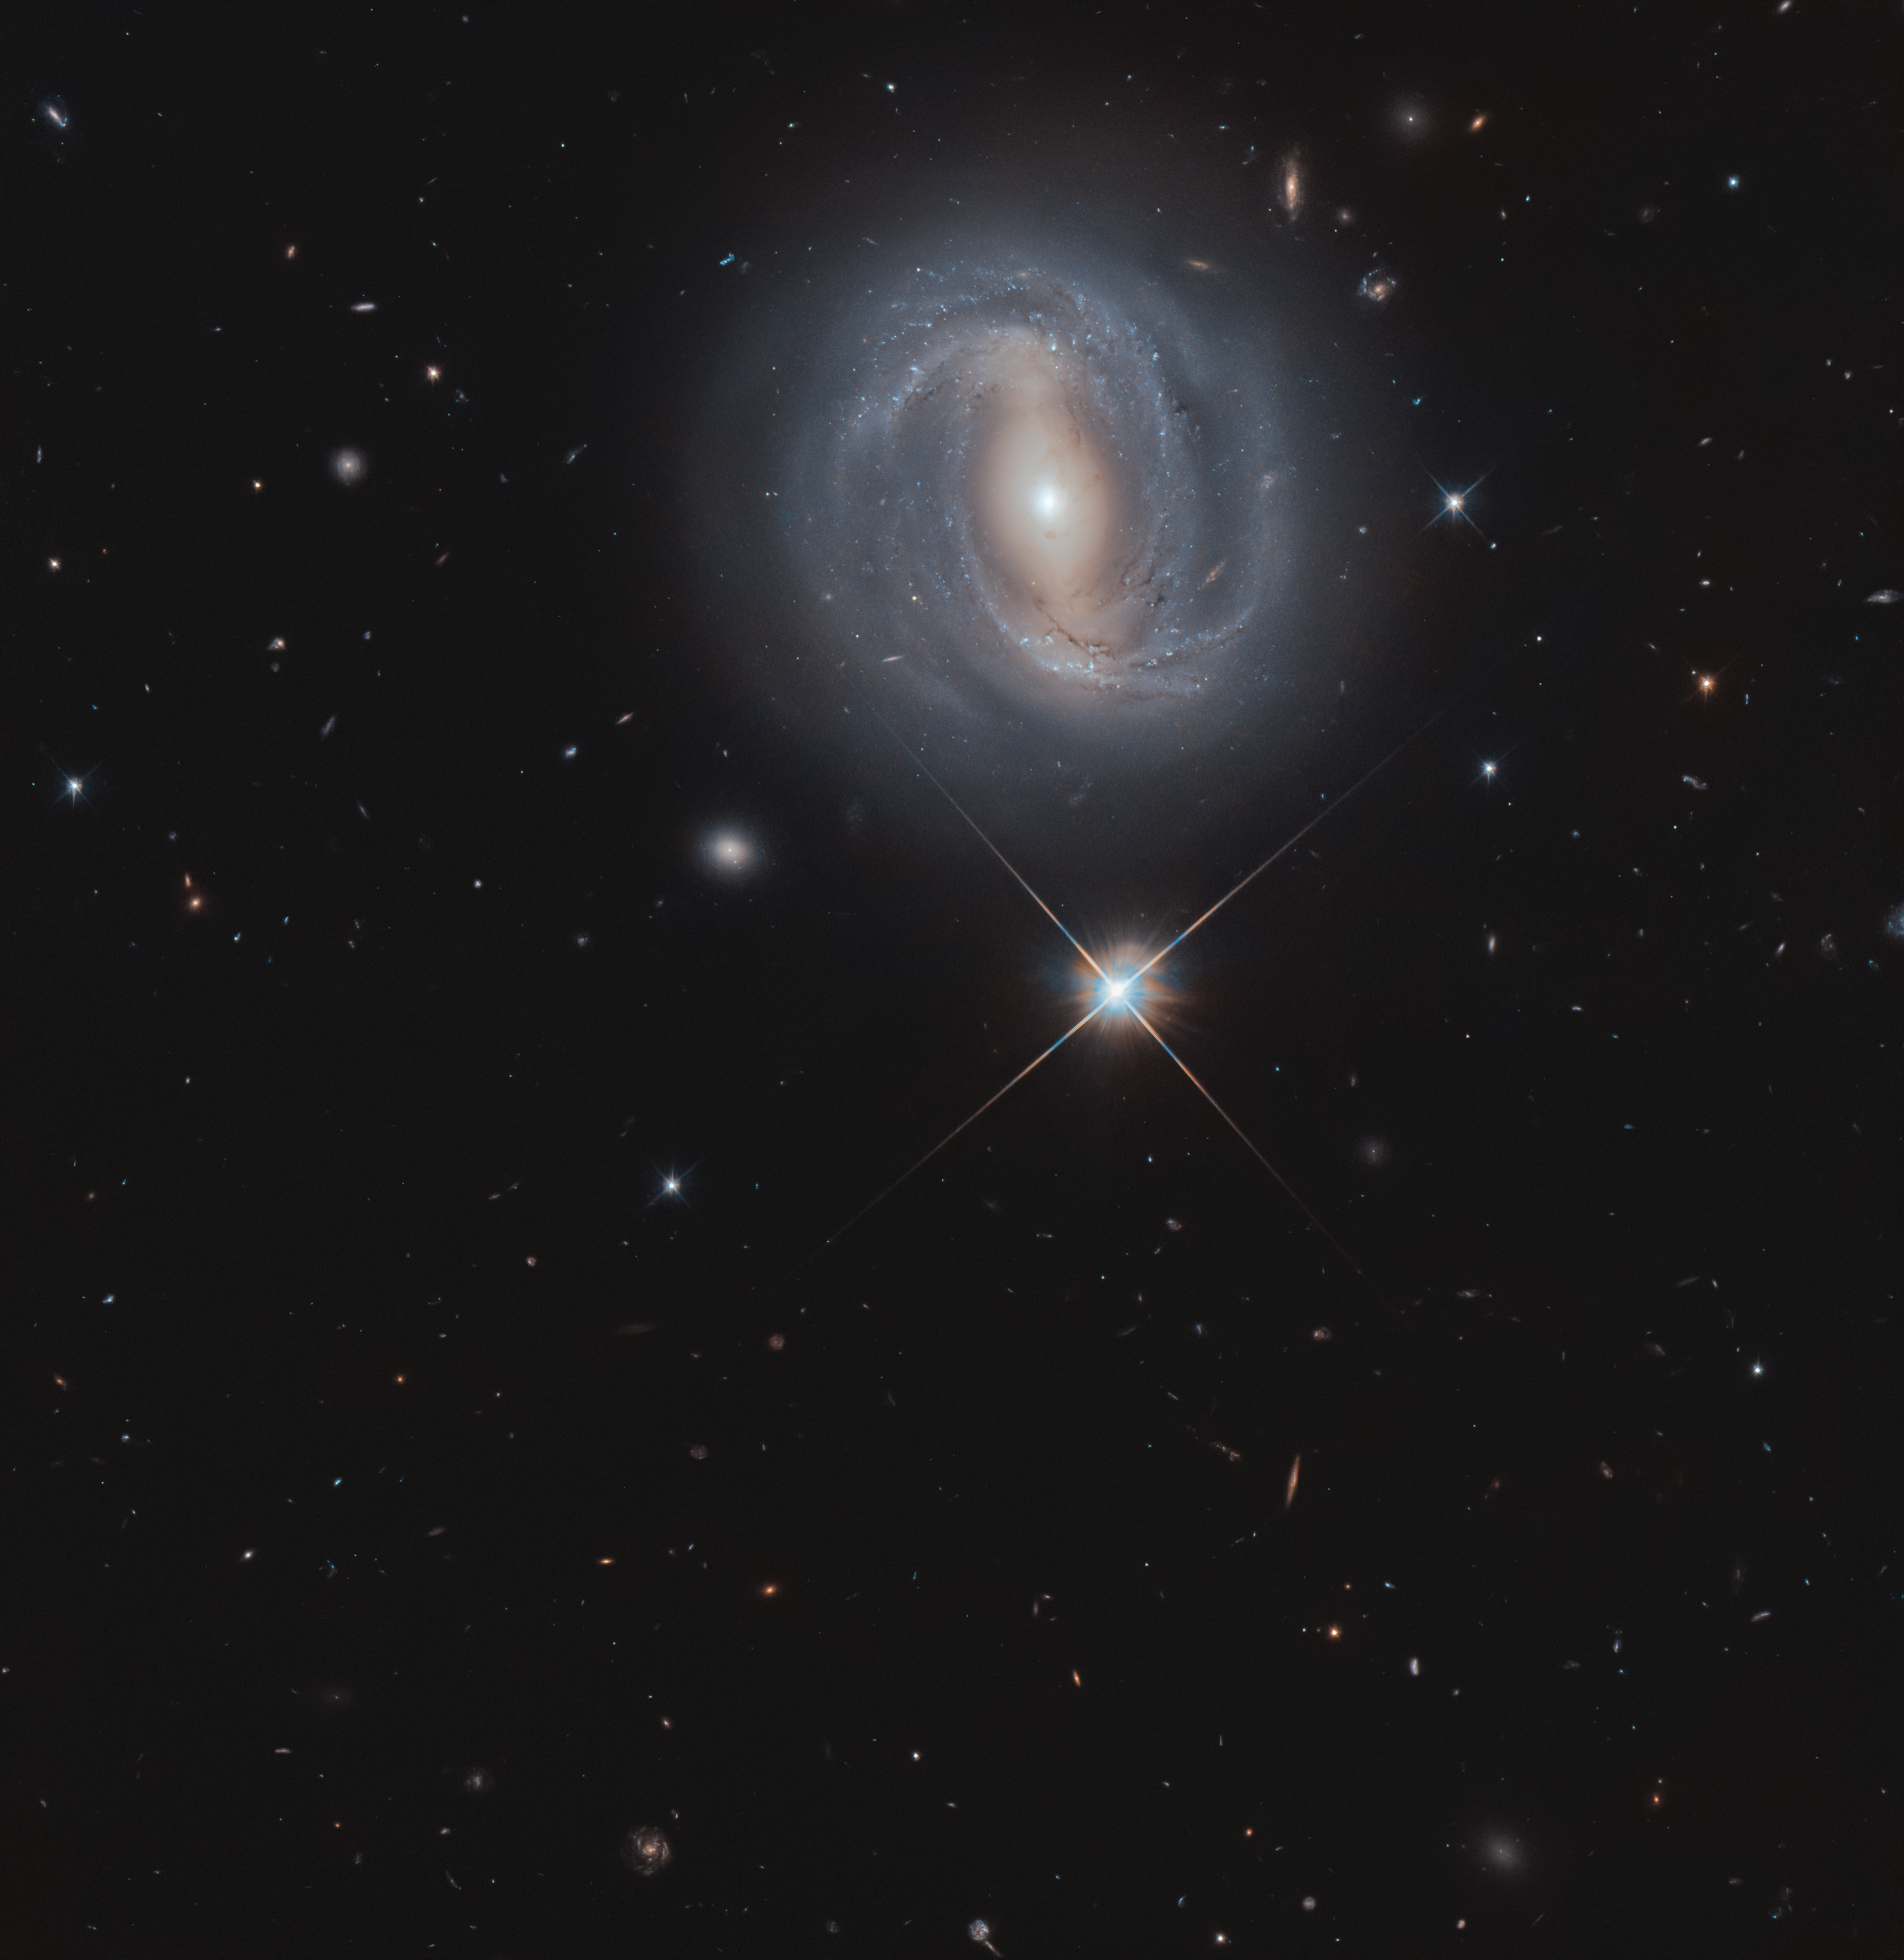

Seeing Near and Far

The barred spiral galaxy known as NGC 4907 shows its best side from 270 million light-years away to anyone who can see it from the northern hemisphere.This is a new image from the NASA/ESA Hubble Space Telescope of the face-on the galaxy, displaying its beautiful spiral arms, wound loosely around its central bright bar of stars.

Shining brightly below the galaxy is a star that is actually within our own Milky Way galaxy. This star appears much brighter than the many millions of stars in NGC 4907 as it is 100 000 times closer, residing only 2500 light-years away.

NGC 4907 is also part of the Coma Cluster, a group of over 1000 galaxies, some of which can be seen around NGC 4907 in this image. This massive cluster of galaxies lies within the constellation of Coma Berenices, which is named for the locks of Queen Berenice II of Egypt: the only constellation named after a historical person.

Credit: ESA/Hubble & NASA, M. Gregg